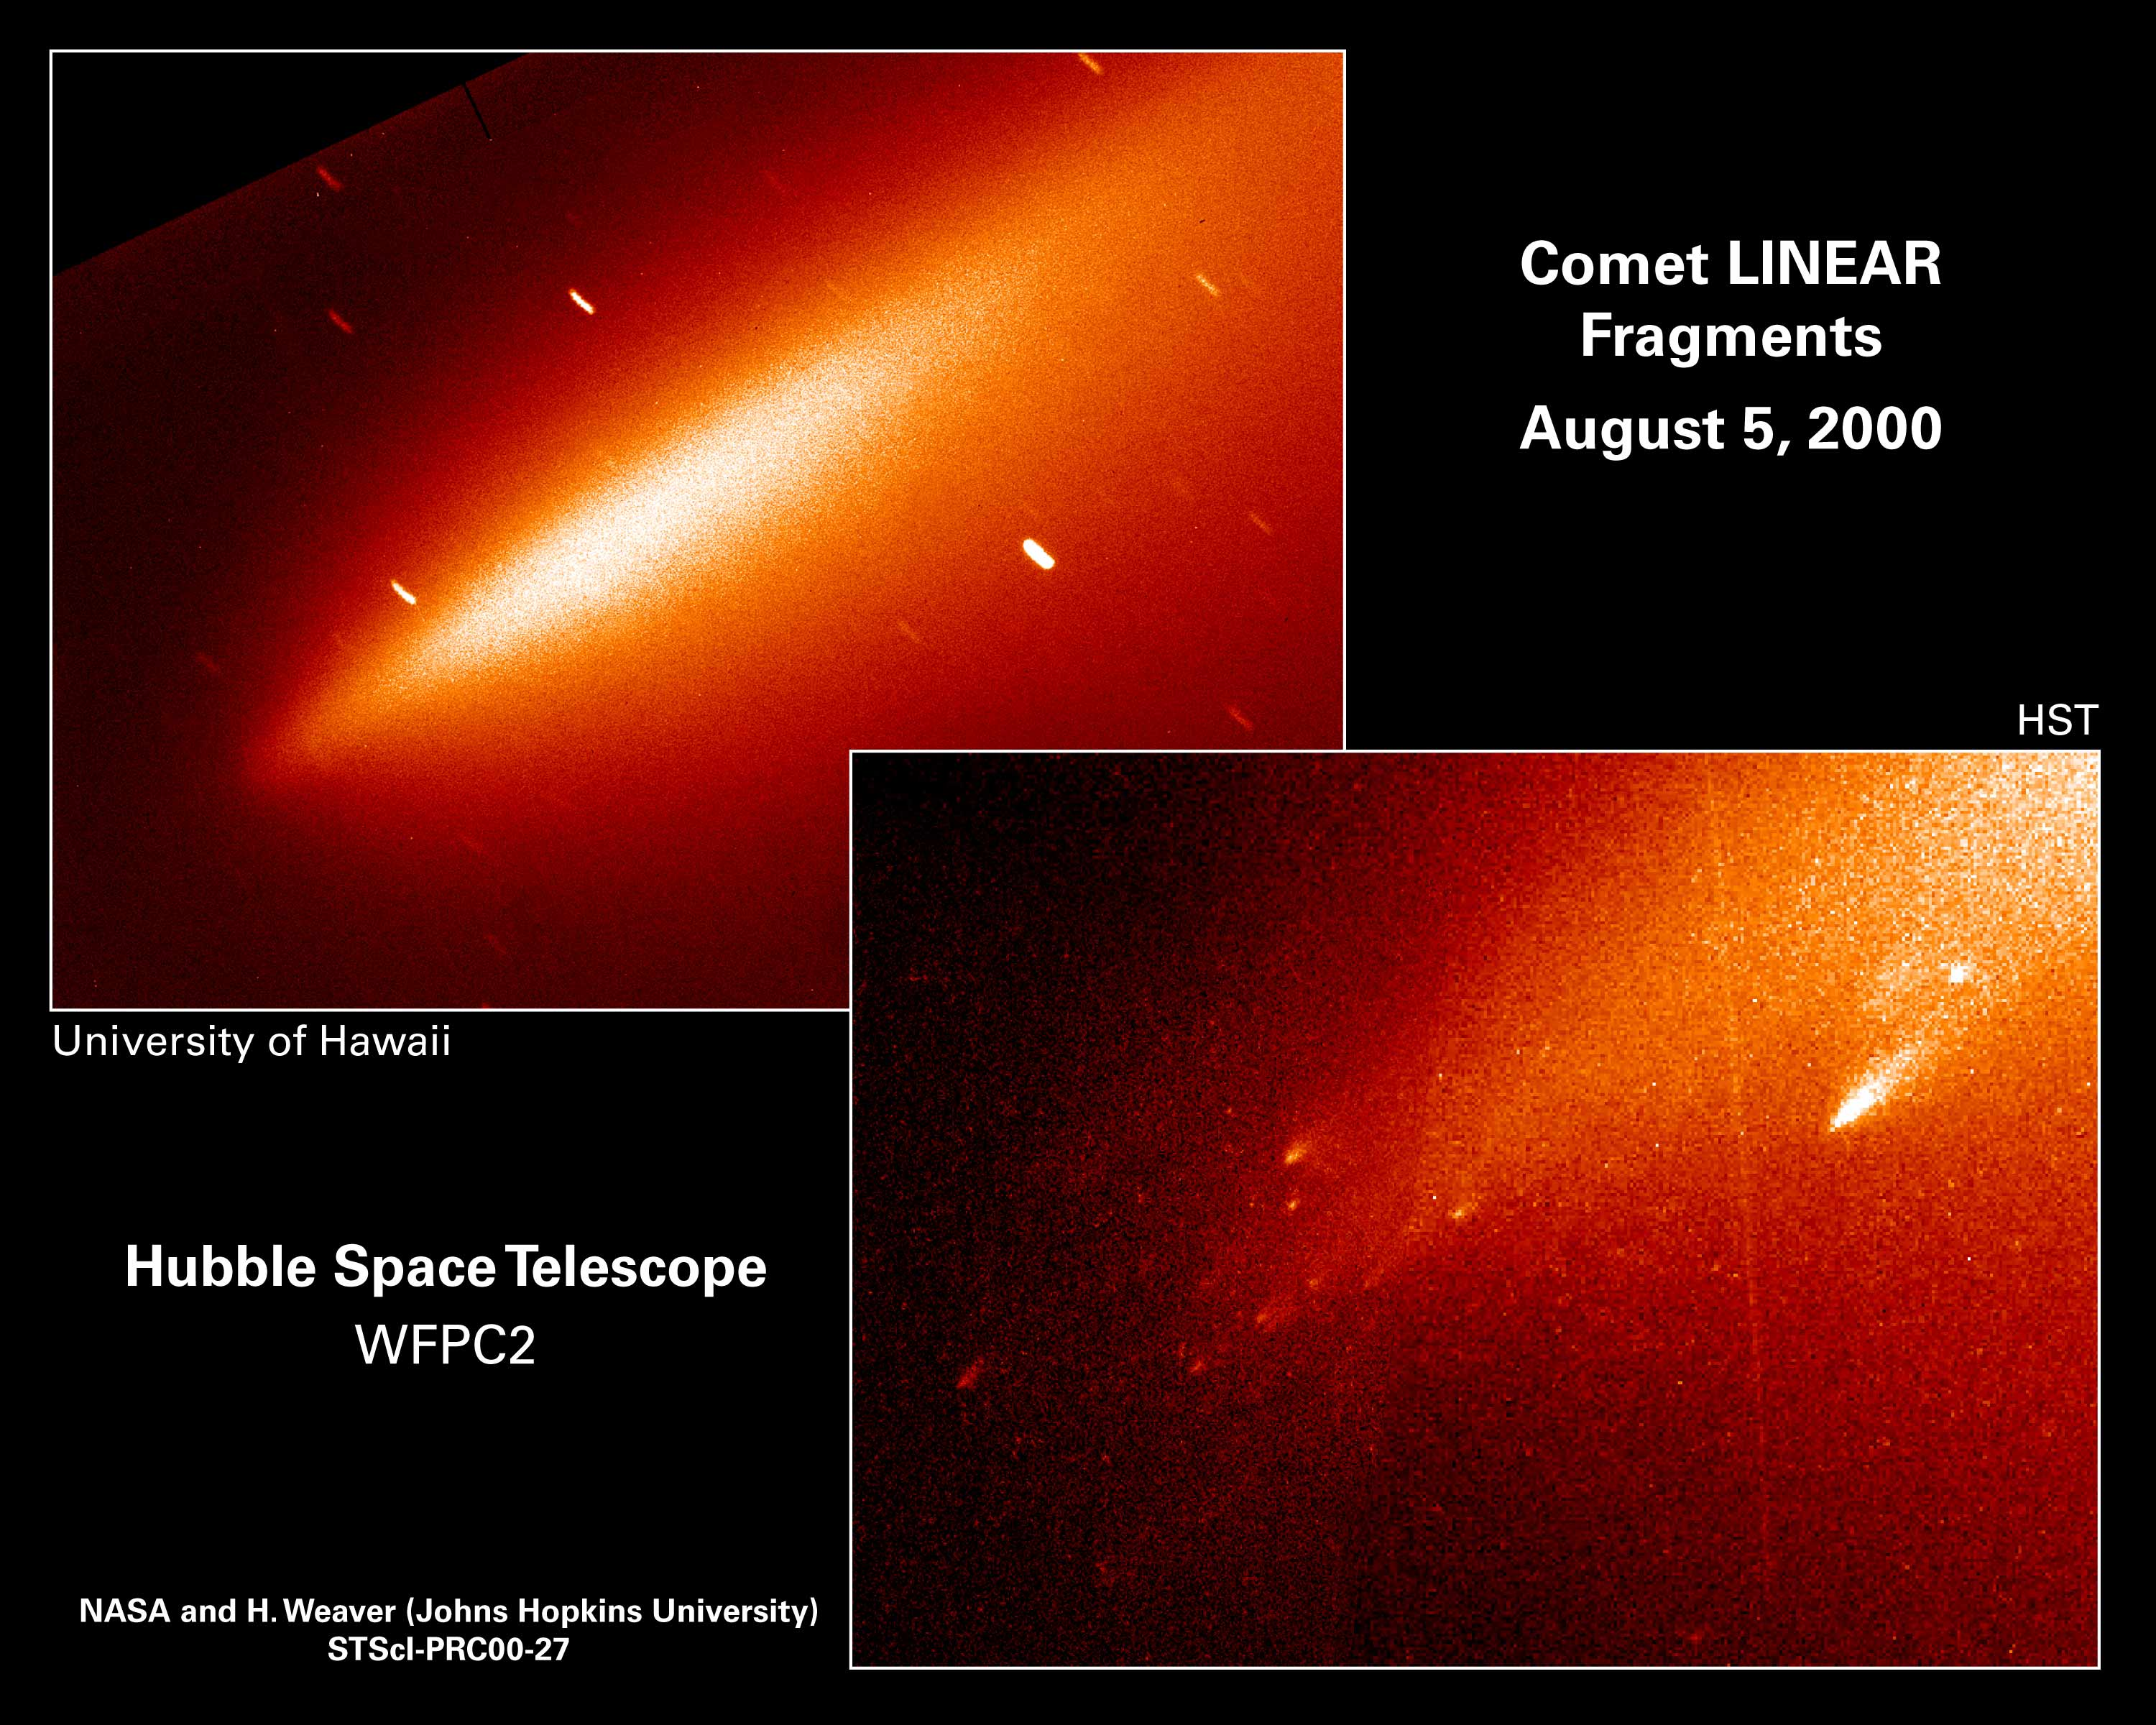

Comet Linear Fragments

Lower Right

In one stunning Hubble picture the fate of the mysteriously vanished solid nucleus of Comet LINEAR has been settled. The Hubble picture shows that the comet nucleus has been reduced to a shower of glowing 'mini-comets' resembling the fiery fragments from an exploding aerial firework.

Upper Right

A ground-based telescopic view (2.2-meter telescope) of Comet LINEAR taken on August 5, at nearly the same time as the Hubble observations.

Credit: Harold Weaver (the Johns Hopkins University), and the HST Comet LINEAR Investigation Team, University of Hawaii and NASA/ESA